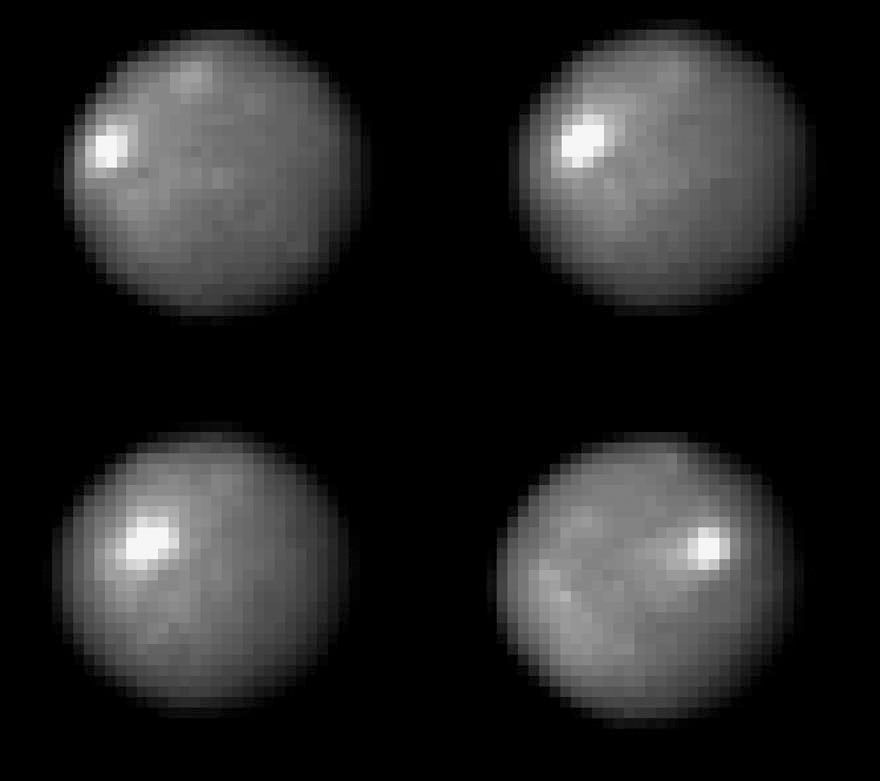

Hubble tracks Ceres

The NASA/ESA Hubble Space Telescope took these images of the asteroid 1 Ceres over a 2-hour and 20-minute span, the time it takes the Texas-sized object to complete one quarter of a rotation. One day on Ceres lasts 9 hours.

Credit: NASA, ESA, J. Parker (Southwest Research Institute), P. Thomas (Cornell University), and L. McFadden (University of Maryland, College Park)